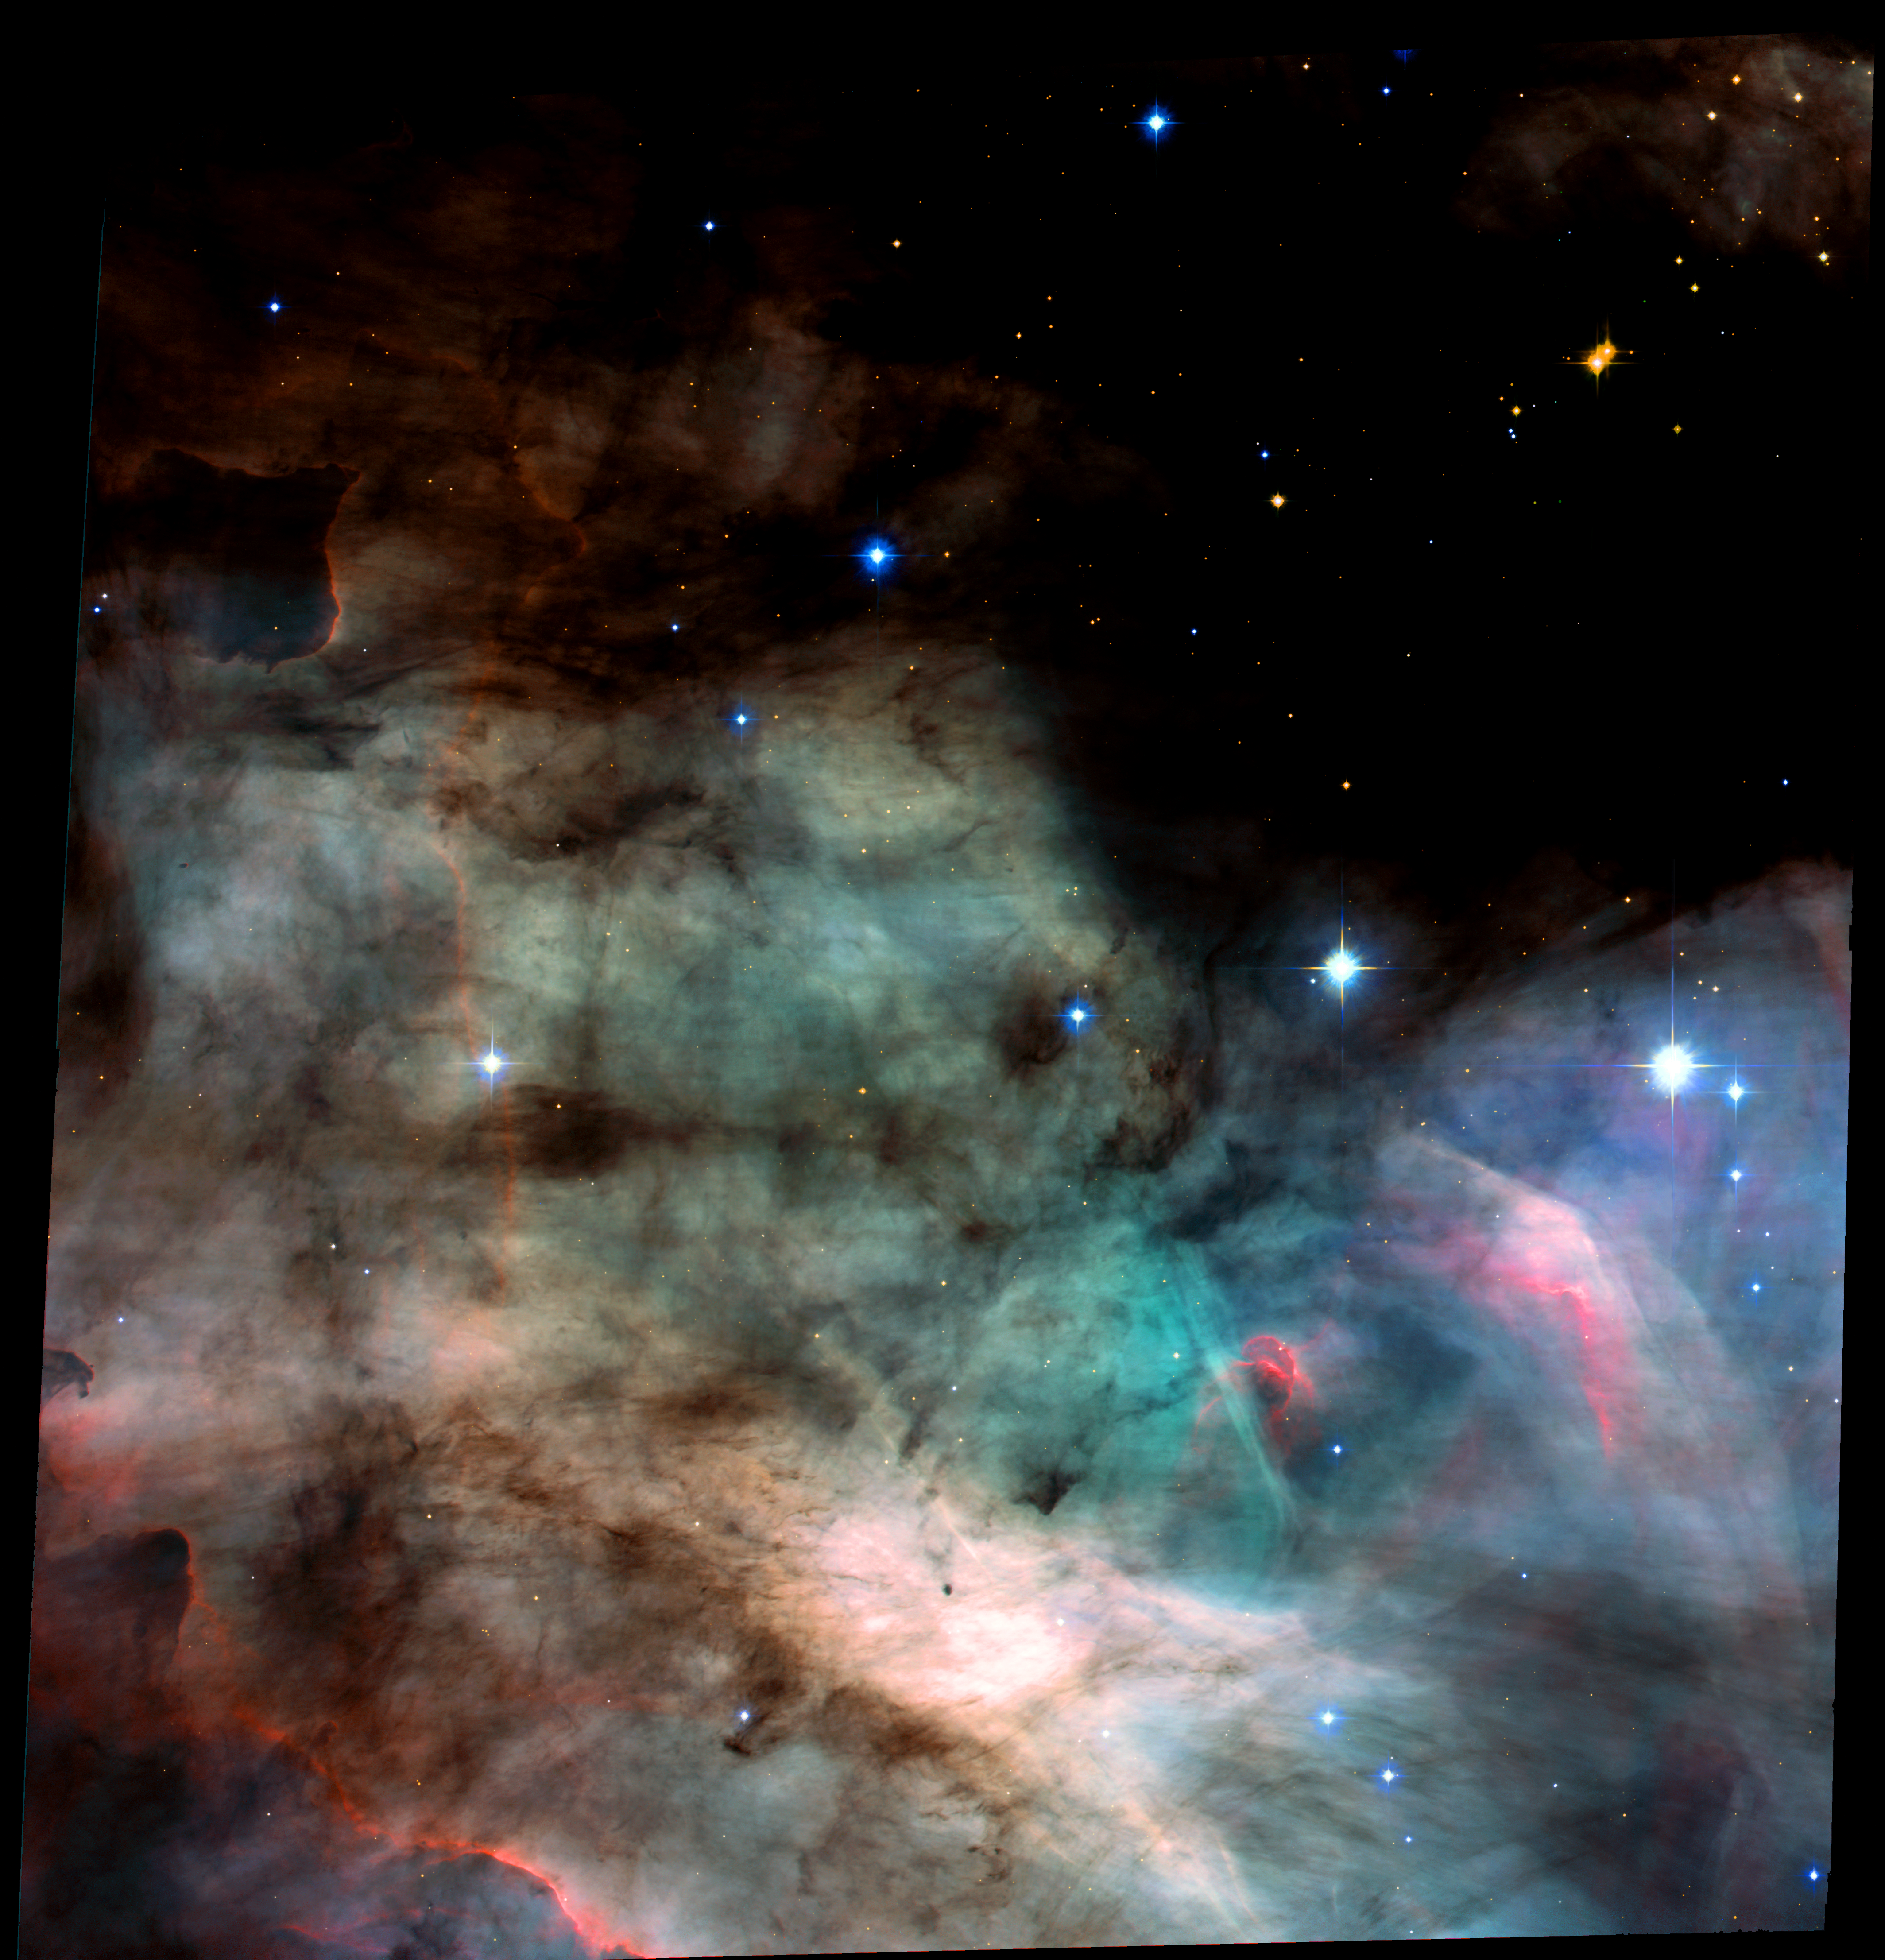

Omega Nebula/Swan Nebula/M17 (ACS Full Field Image)

Peering into a celestial maternity ward called the Omega Nebula or M17, images from NASA's Hubble Space Telescope revealed a watercolor fantasy-world of glowing gases, where stars and perhaps embryonic planetary systems are forming.

Credit: NASA, H. Ford (JHU), G. Illingworth (UCSC/LO), M.Clampin (STScI), G. Hartig (STScI), the ACS Science Team, and ESAThe ACS Science Team: H. Ford, G. Illingworth, M. Clampin, G. Hartig, T. Allen, K. Anderson, F. Bartko, N. Benitez, J. Blakeslee, R. Bouwens, T. Broadhurst, R. Brown, C. Burrows, D. Campbell, E. Cheng, N. Cross, P. Feldman, M. Franx, D. Golimowski, C. Gronwall, R. Kimble, J. Krist, M. Lesser, D. Magee, A. Martel, W. J. McCann, G. Meurer, G. Miley, M. Postman, P. Rosati, M. Sirianni, W. Sparks, P. Sullivan, H. Tran, Z. Tsvetanov, R. White, and R. Woodruff.